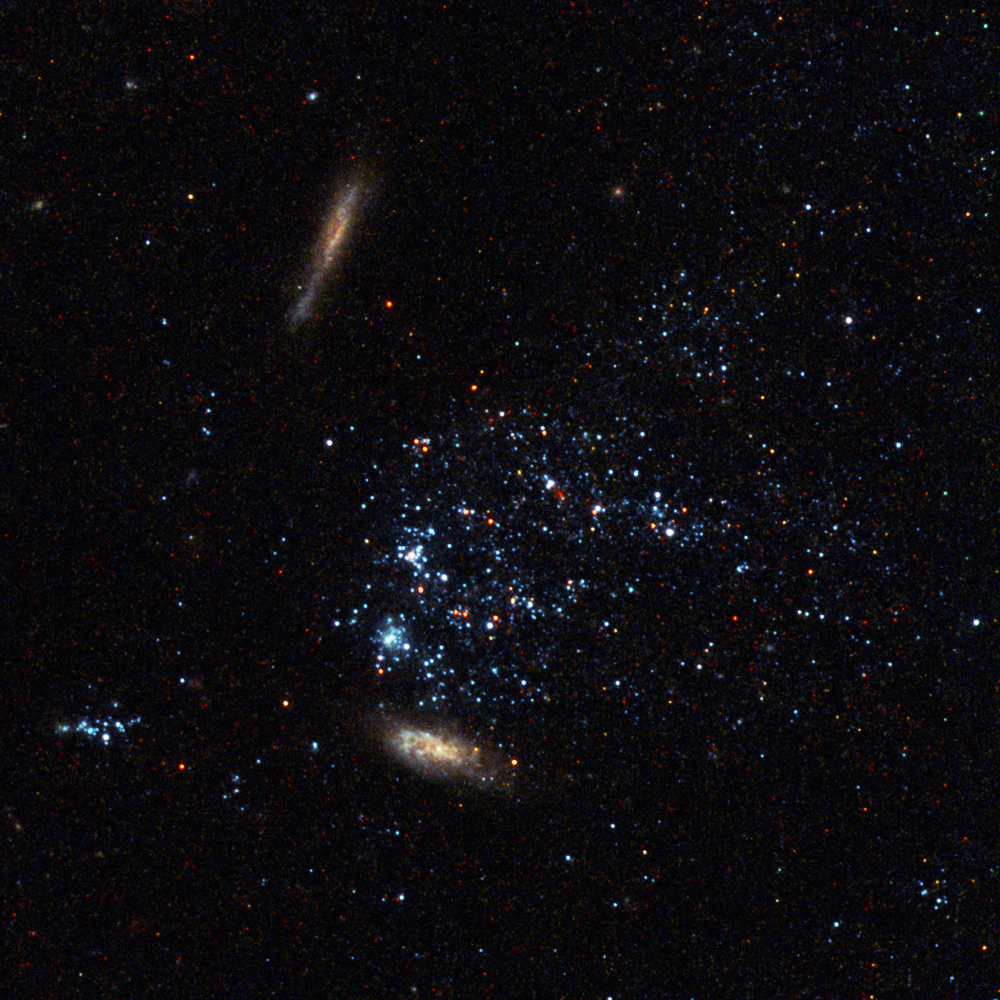

Pinwheel Galaxy close-up 6

Two distant galaxies behind Messier 101 and a collection of individual foreground stars from one of its spiral arms.

Credit: Image: European Space Agency & NASA
Acknowledgements:
Project Investigators for the original Hubble data: K.D. Kuntz (GSFC), F. Bresolin (University of Hawaii), J. Trauger (JPL), J. Mould (NOAO), and Y.-H. Chu (University of Illinois, Urbana)
Image processing: Davide De Martin (ESA/Hubble)
CFHT image: Canada-France-Hawaii Telescope/J.-C. Cuillandre/Coelum
NOAO image: George Jacoby, Bruce Bohannan, Mark Hanna/NOAO/AURA/NSF